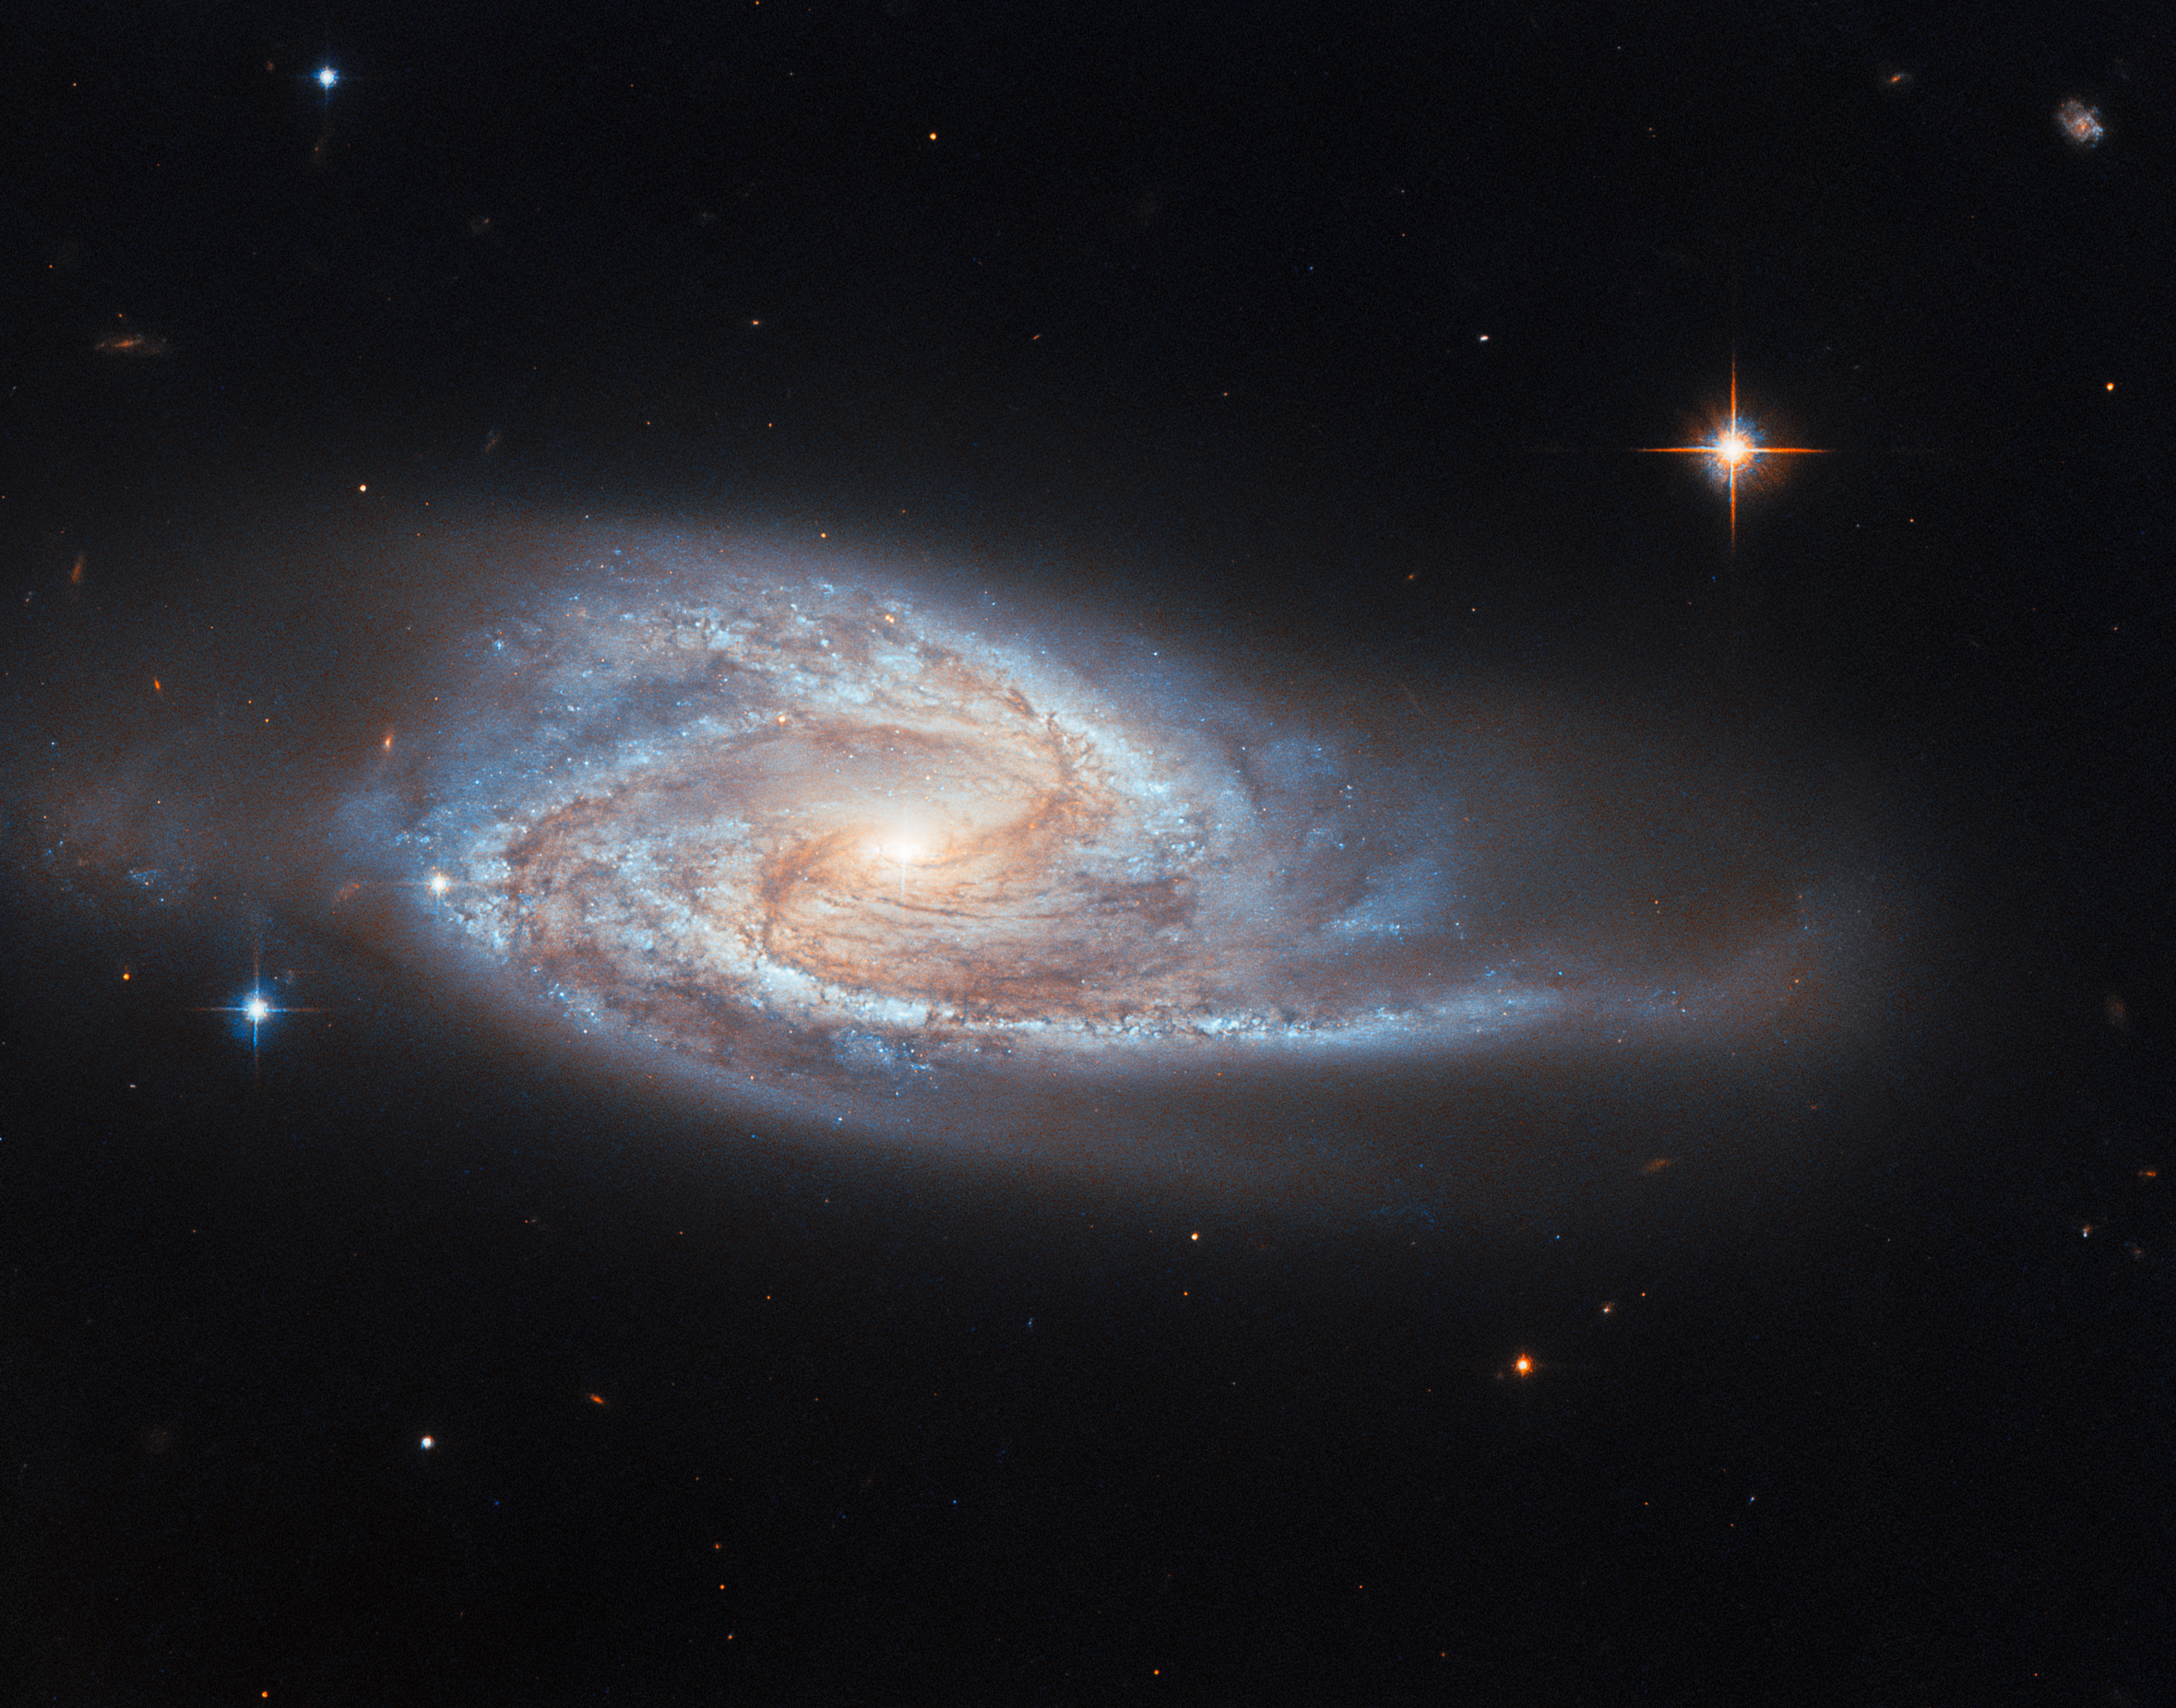

Hiding a bright secret

Looking past its long spiral arms filled with stars and the dark threads of dust crossing it, your eye might be caught by the shining point at the centre of UGC 3478, the spiral galaxy starring in this Hubble Picture of the Week. This point is the galaxy’s nucleus, and indeed there is something special about it: it is a growing giant black hole which astronomers call an active galactic nucleus, or AGN.

UGC 3478, located in the constellation Camelopardalis, is what is known as a Seyfert galaxy. This is a type of galaxy with an AGN at its core. Like all such ‘active galaxies’, the brightness that you see here hides a supermassive black hole at the centre of the galaxy. A disc of gas spirals into this black hole, and as the material crashes together and heats up it emits very strong radiation. The spectrum of this radiation includes hard X-ray emission, which clearly mark it out from the stars in the galaxy. Despite the strong brightness of the compact central region, we can still clearly see the disc of the galaxy around it, which is a defining factor of a Seyfert galaxy.

Many active galaxies are known to astronomers at vast distances from Earth, thanks to the great brightness of their nuclei highlighting them next to other, dimmer galaxies. At 128 million light-years from Earth, UGC 3478 is positively neighbourly to us. The data used to make this image come from a Hubble survey of nearby powerful AGNs identified by their output of relatively high-energy X-rays, like this one, which it is hoped can help astronomers to understand how the galaxies interact with the supermassive black holes at their hearts.

Credit: ESA/Hubble & NASA, M. Koss, A. Barth